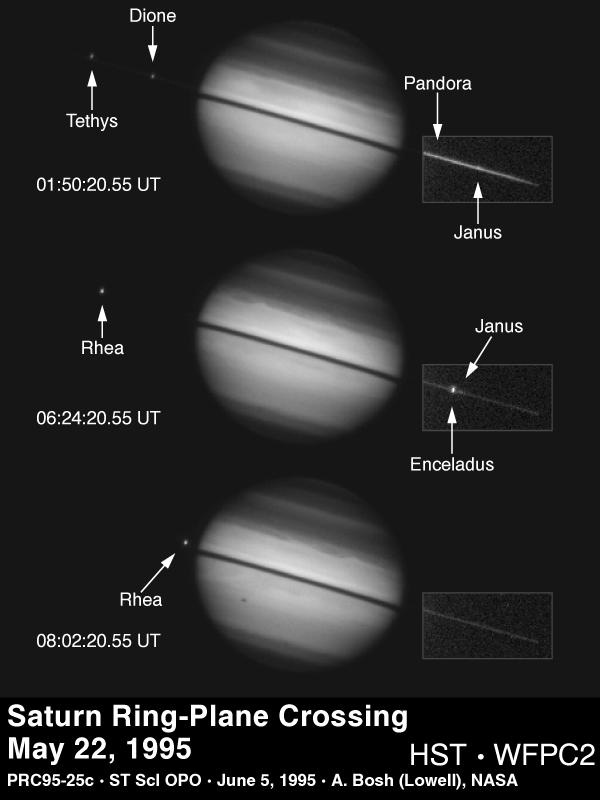

Saturn ring-plane crossing

This sequence of images from the Hubble Space Telescope documents a rare astronomical alignment -- Saturn's magnificent ring system turned edge-on. This occurs when the Earth passes through Saturn's ring plane, as it does approximately every 15 years.

Credit: Amanda S. Bosh (Lowell Observatory), Andrew S. Rivkin (Univ. of Arizona/LPL), the HST High Speed Photometer Instrument Team (R.C. Bless, PI), and NASA/ESA